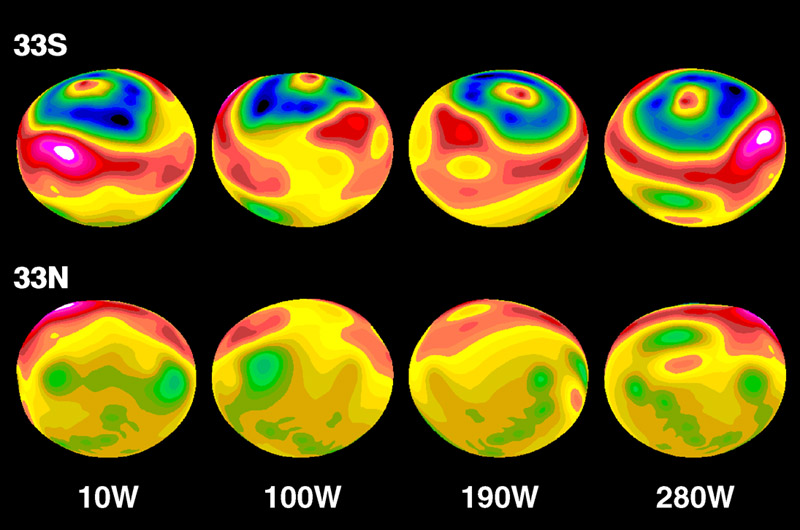

Crater on Asteroid Vesta

A false-color topographic map, projected onto a model having Vesta's elliptical shape. A circular impact crater, with central peak, clearly dominates the southern hemisphere.

The model has been rotated at 90 degree intervals. The map is based on photo-analysis of Hubble Space Telescope images.

Credit: Ben Zellner of Georgia Southern University; Peter Thomas, CornellUniversity, NASA/ESA